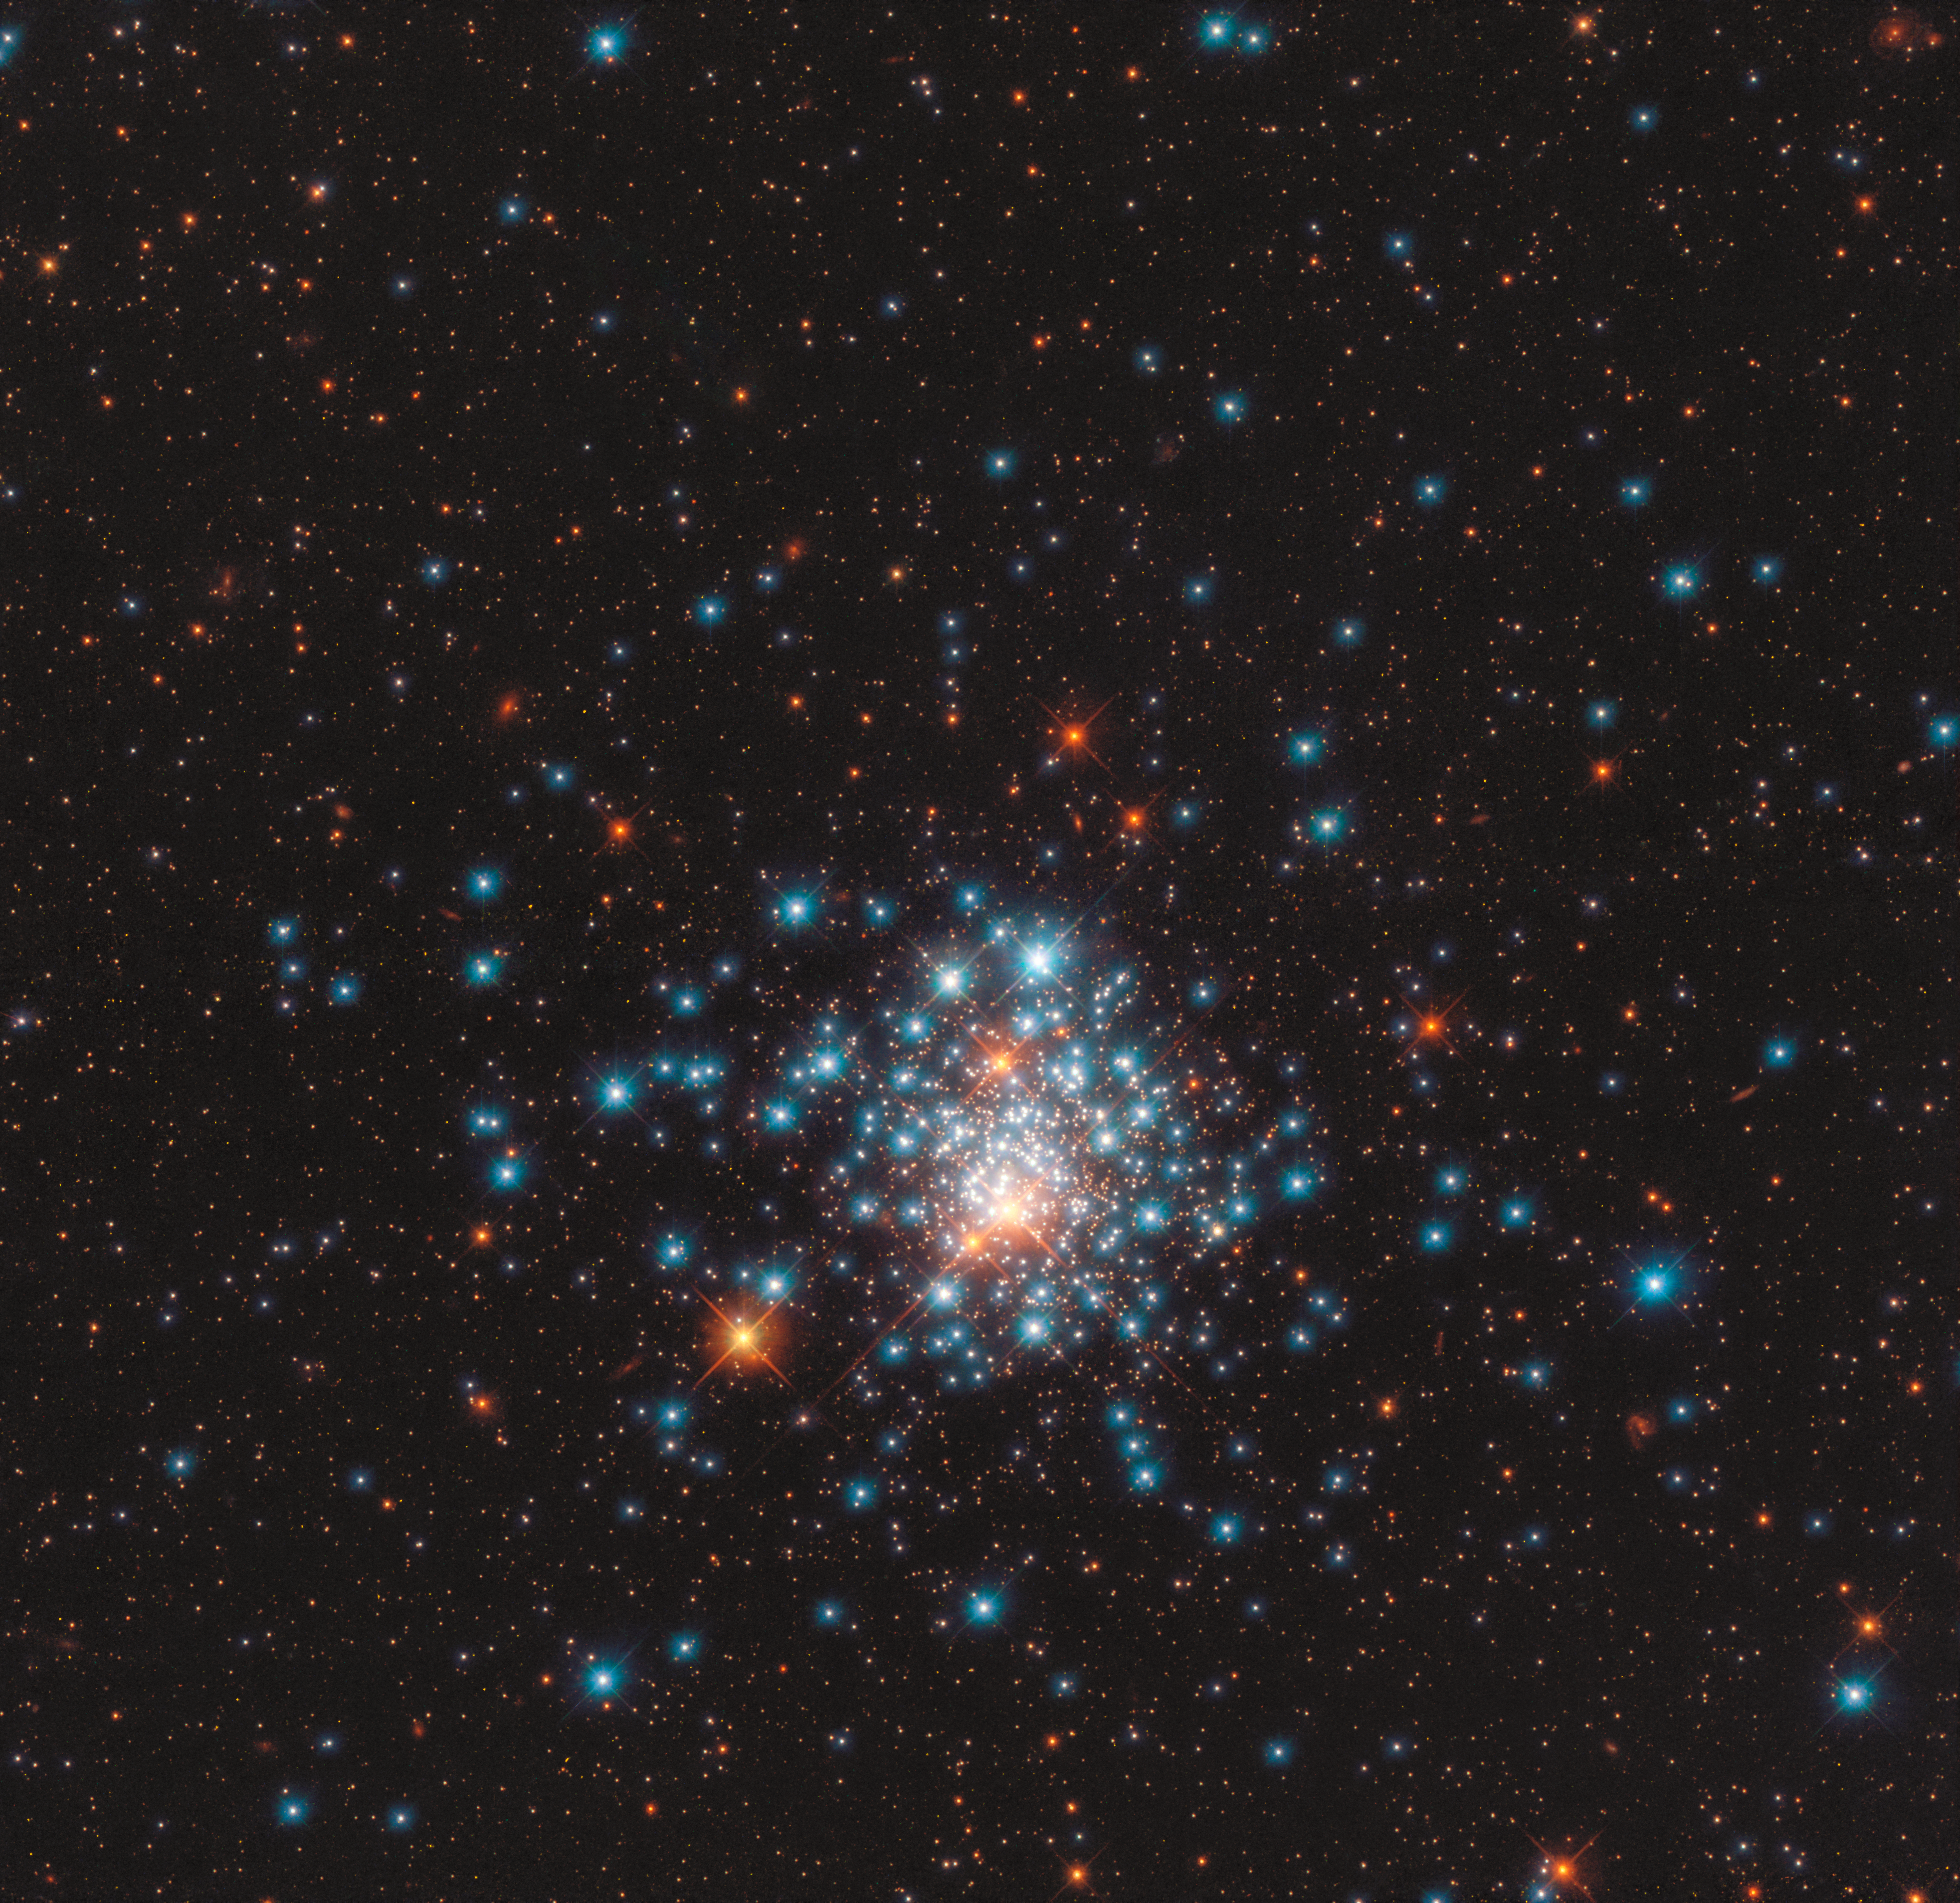

A Pocketful of Stars

Many colourful stars are packed close together in this image of the globular cluster NGC 1805, taken by the NASA/ESA Hubble Space Telescope. This tight grouping of thousands of stars is located near the edge of the Large Magellanic Cloud, a satellite galaxy of our own Milky Way. The stars orbit closely to one another, like bees swarming around a hive. In the dense centre of one of these clusters, stars are 100 to 1000 times closer together than the nearest stars are to our Sun, making planetary systems around them unlikely.

The striking difference in star colours is illustrated beautifully in this image, which combines two different types of light: blue stars, shining brightest in near-ultraviolet light, and red stars, illuminated in red and near-infrared. Space telescopes like Hubble can observe in the ultraviolet because they are positioned above Earth’s atmosphere, which absorbs most of this wavelength, making it inaccessible to ground-based facilities.

This young globular cluster can be seen from the southern hemisphere, in the Dorado constellation, which is Portugese for dolphinfish. Usually, globular clusters contain stars which are born at the same time; however, NGC 1805 is unusual as it appears to host two different populations of stars with ages millions of years apart. Observing such clusters of stars can help astronomers understand how stars evolve, and what factors determine whether they end their lives as white dwarfs, or explode as supernovae.

Credit: ESA/Hubble & NASA, J. Kalirai